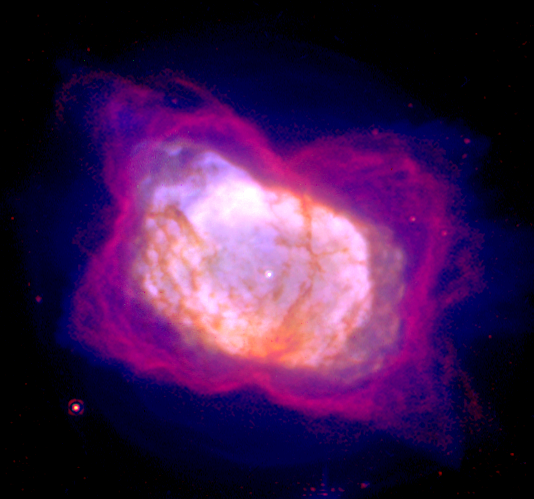

Planetary Nebula NGC 7027

This visible and infrared light picture of NGC 7027 provides a more complete view of how this planetary nebula is being shaped, revealing steps in its evolution.

Credit: William B. Latter (SIRTF Science Center/Caltech) and NASA/ESA